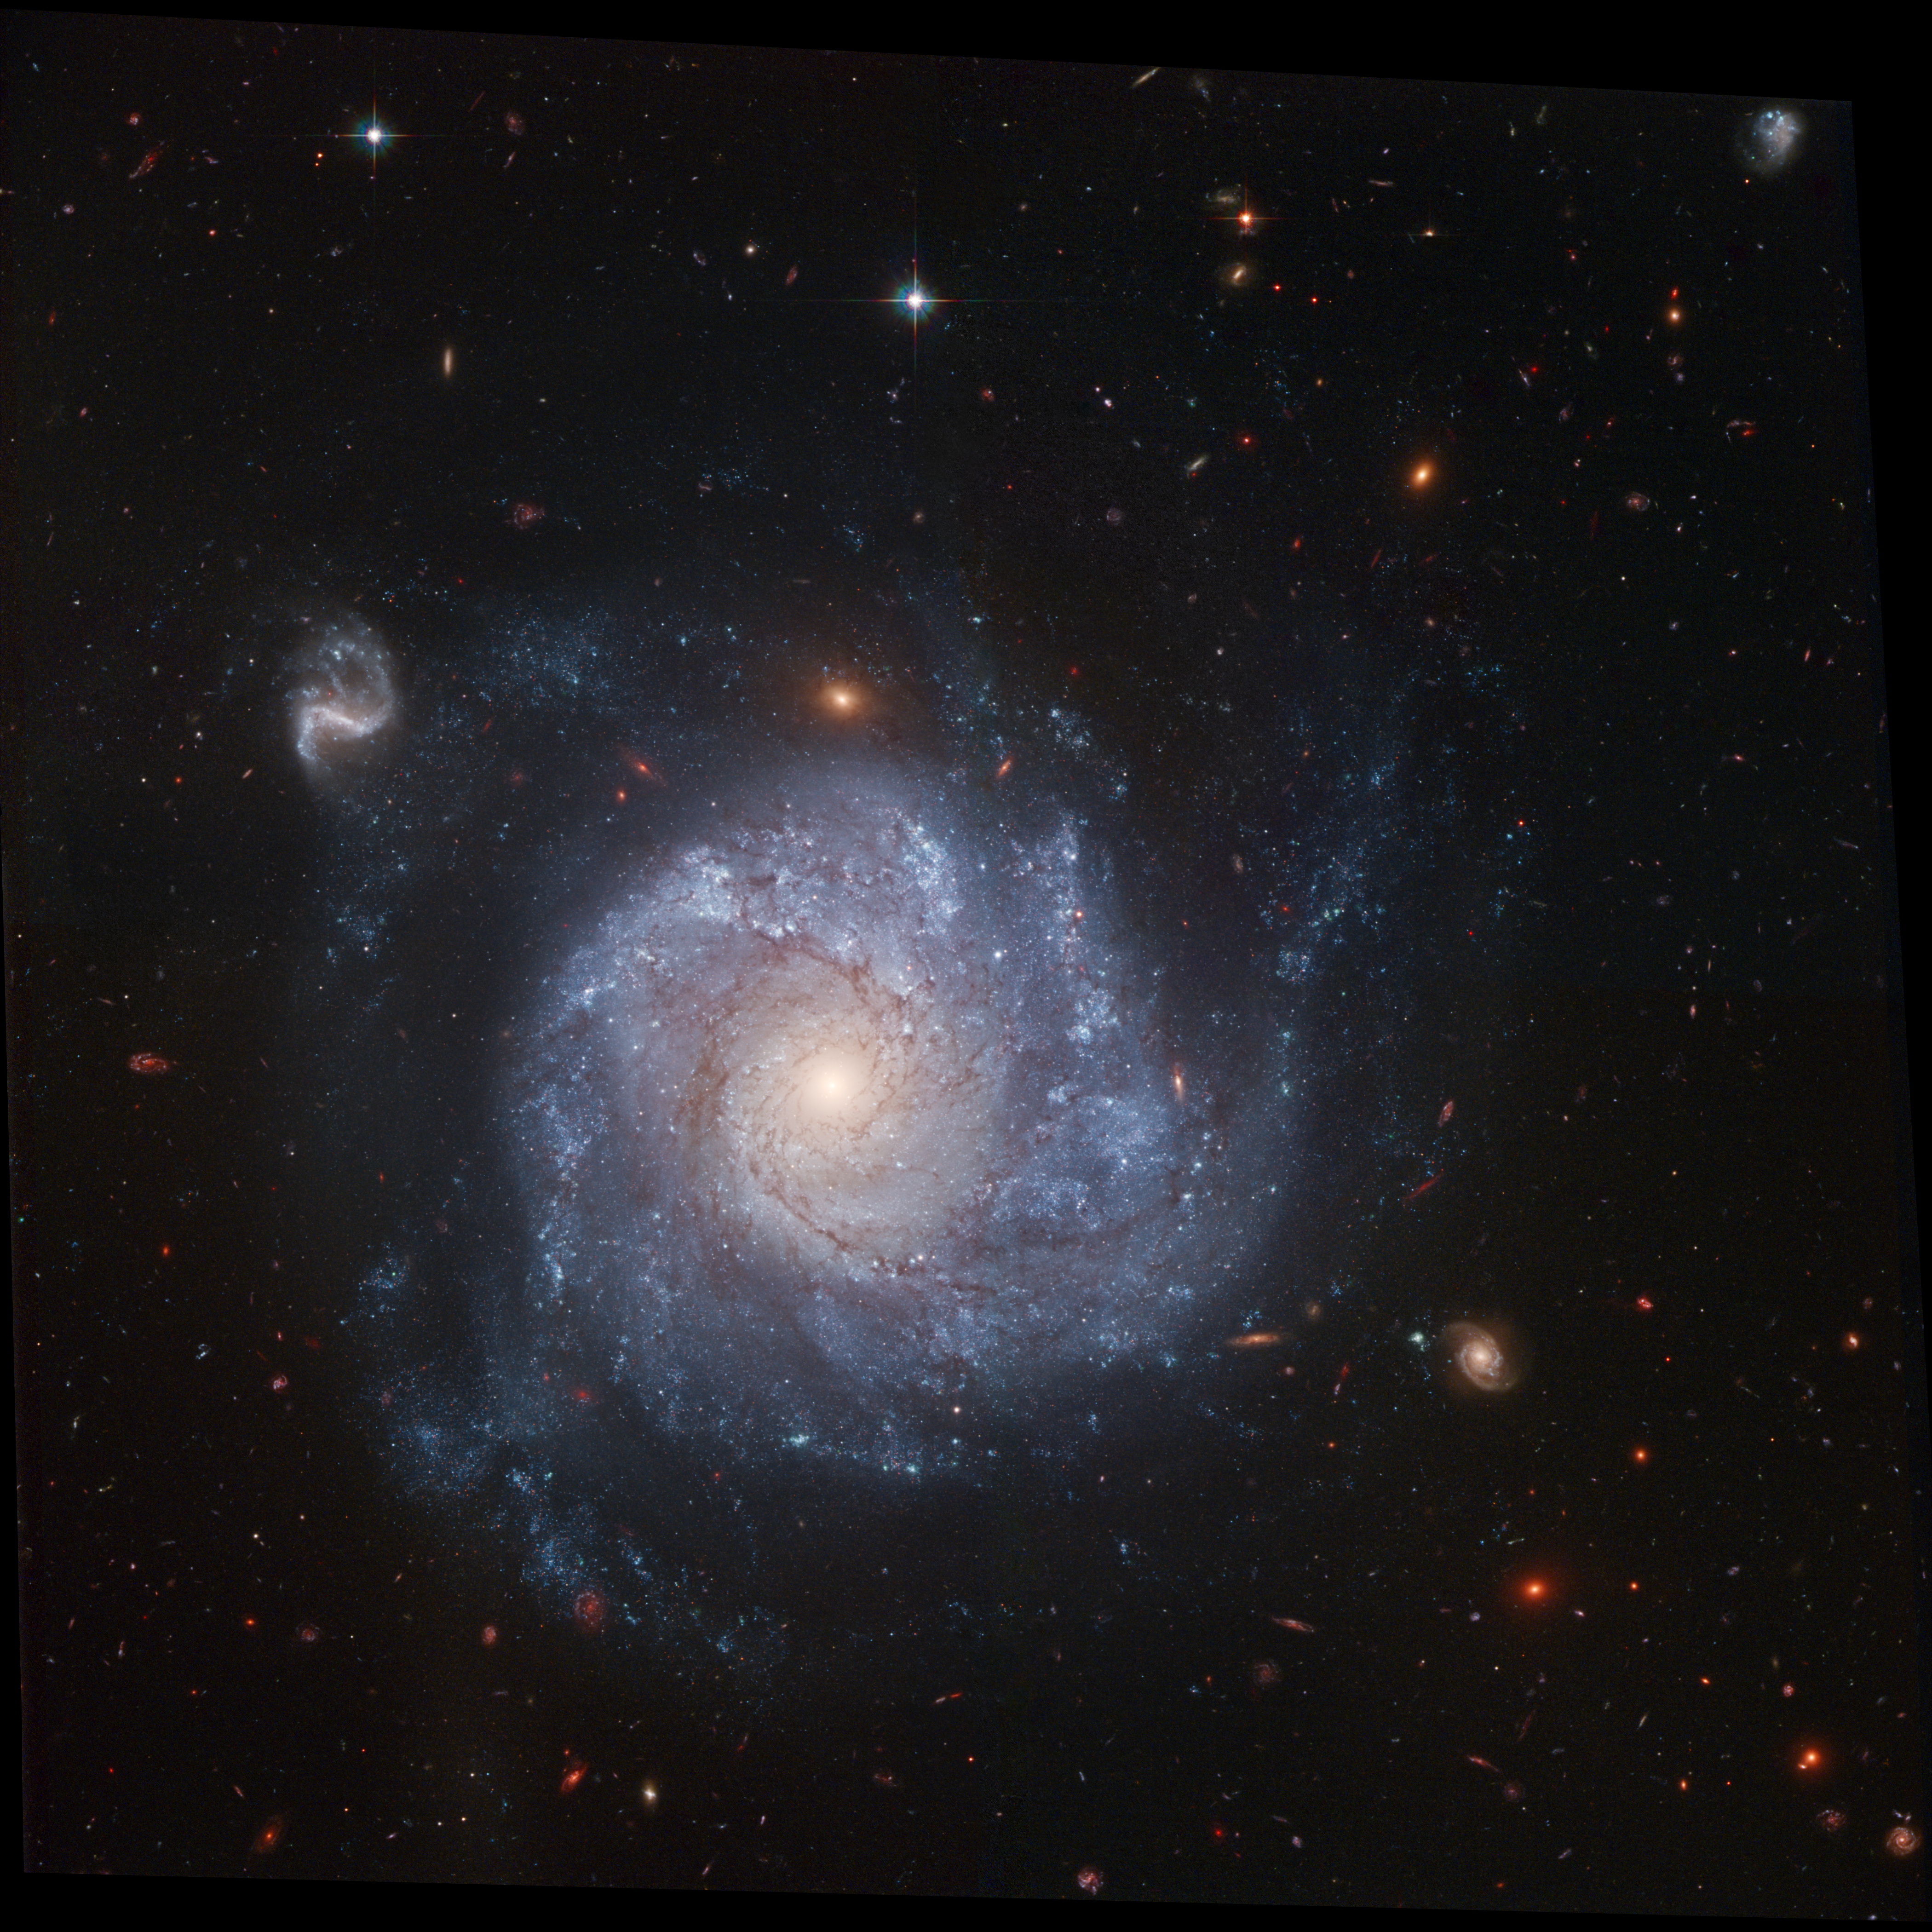

Full ACS field of NGC 1309

This image of NGC 1309 extends out to the physical edge of the ACS field. The image was taken in 2005. NGC 1309 is 100 million light-years (30 Megaparsecs) distant.

Credit: NASA, ESA, The Hubble Heritage Team, (STScI/AURA) and A. Riess (STScI)